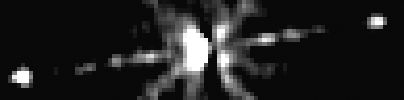

He2-90

This close-up Hubble photo shows a dark, flaring, disk-like structure [off-center] bisecting the bright light from the object. The disk is seen edge-on. Although too large to be an accretion disk, this dark, flaring disk may provide indirect proof of the other's existence. Most theories for producing jets require the presence of an accretion disk.

Credit: NASA/ESA, Raghvendra Sahai (NASA/ESA Jet Propulsion Laboratory), Lars-Ake Nyman (European Southern Observatory, Chile & Onsala Space Observatory, Sweden).